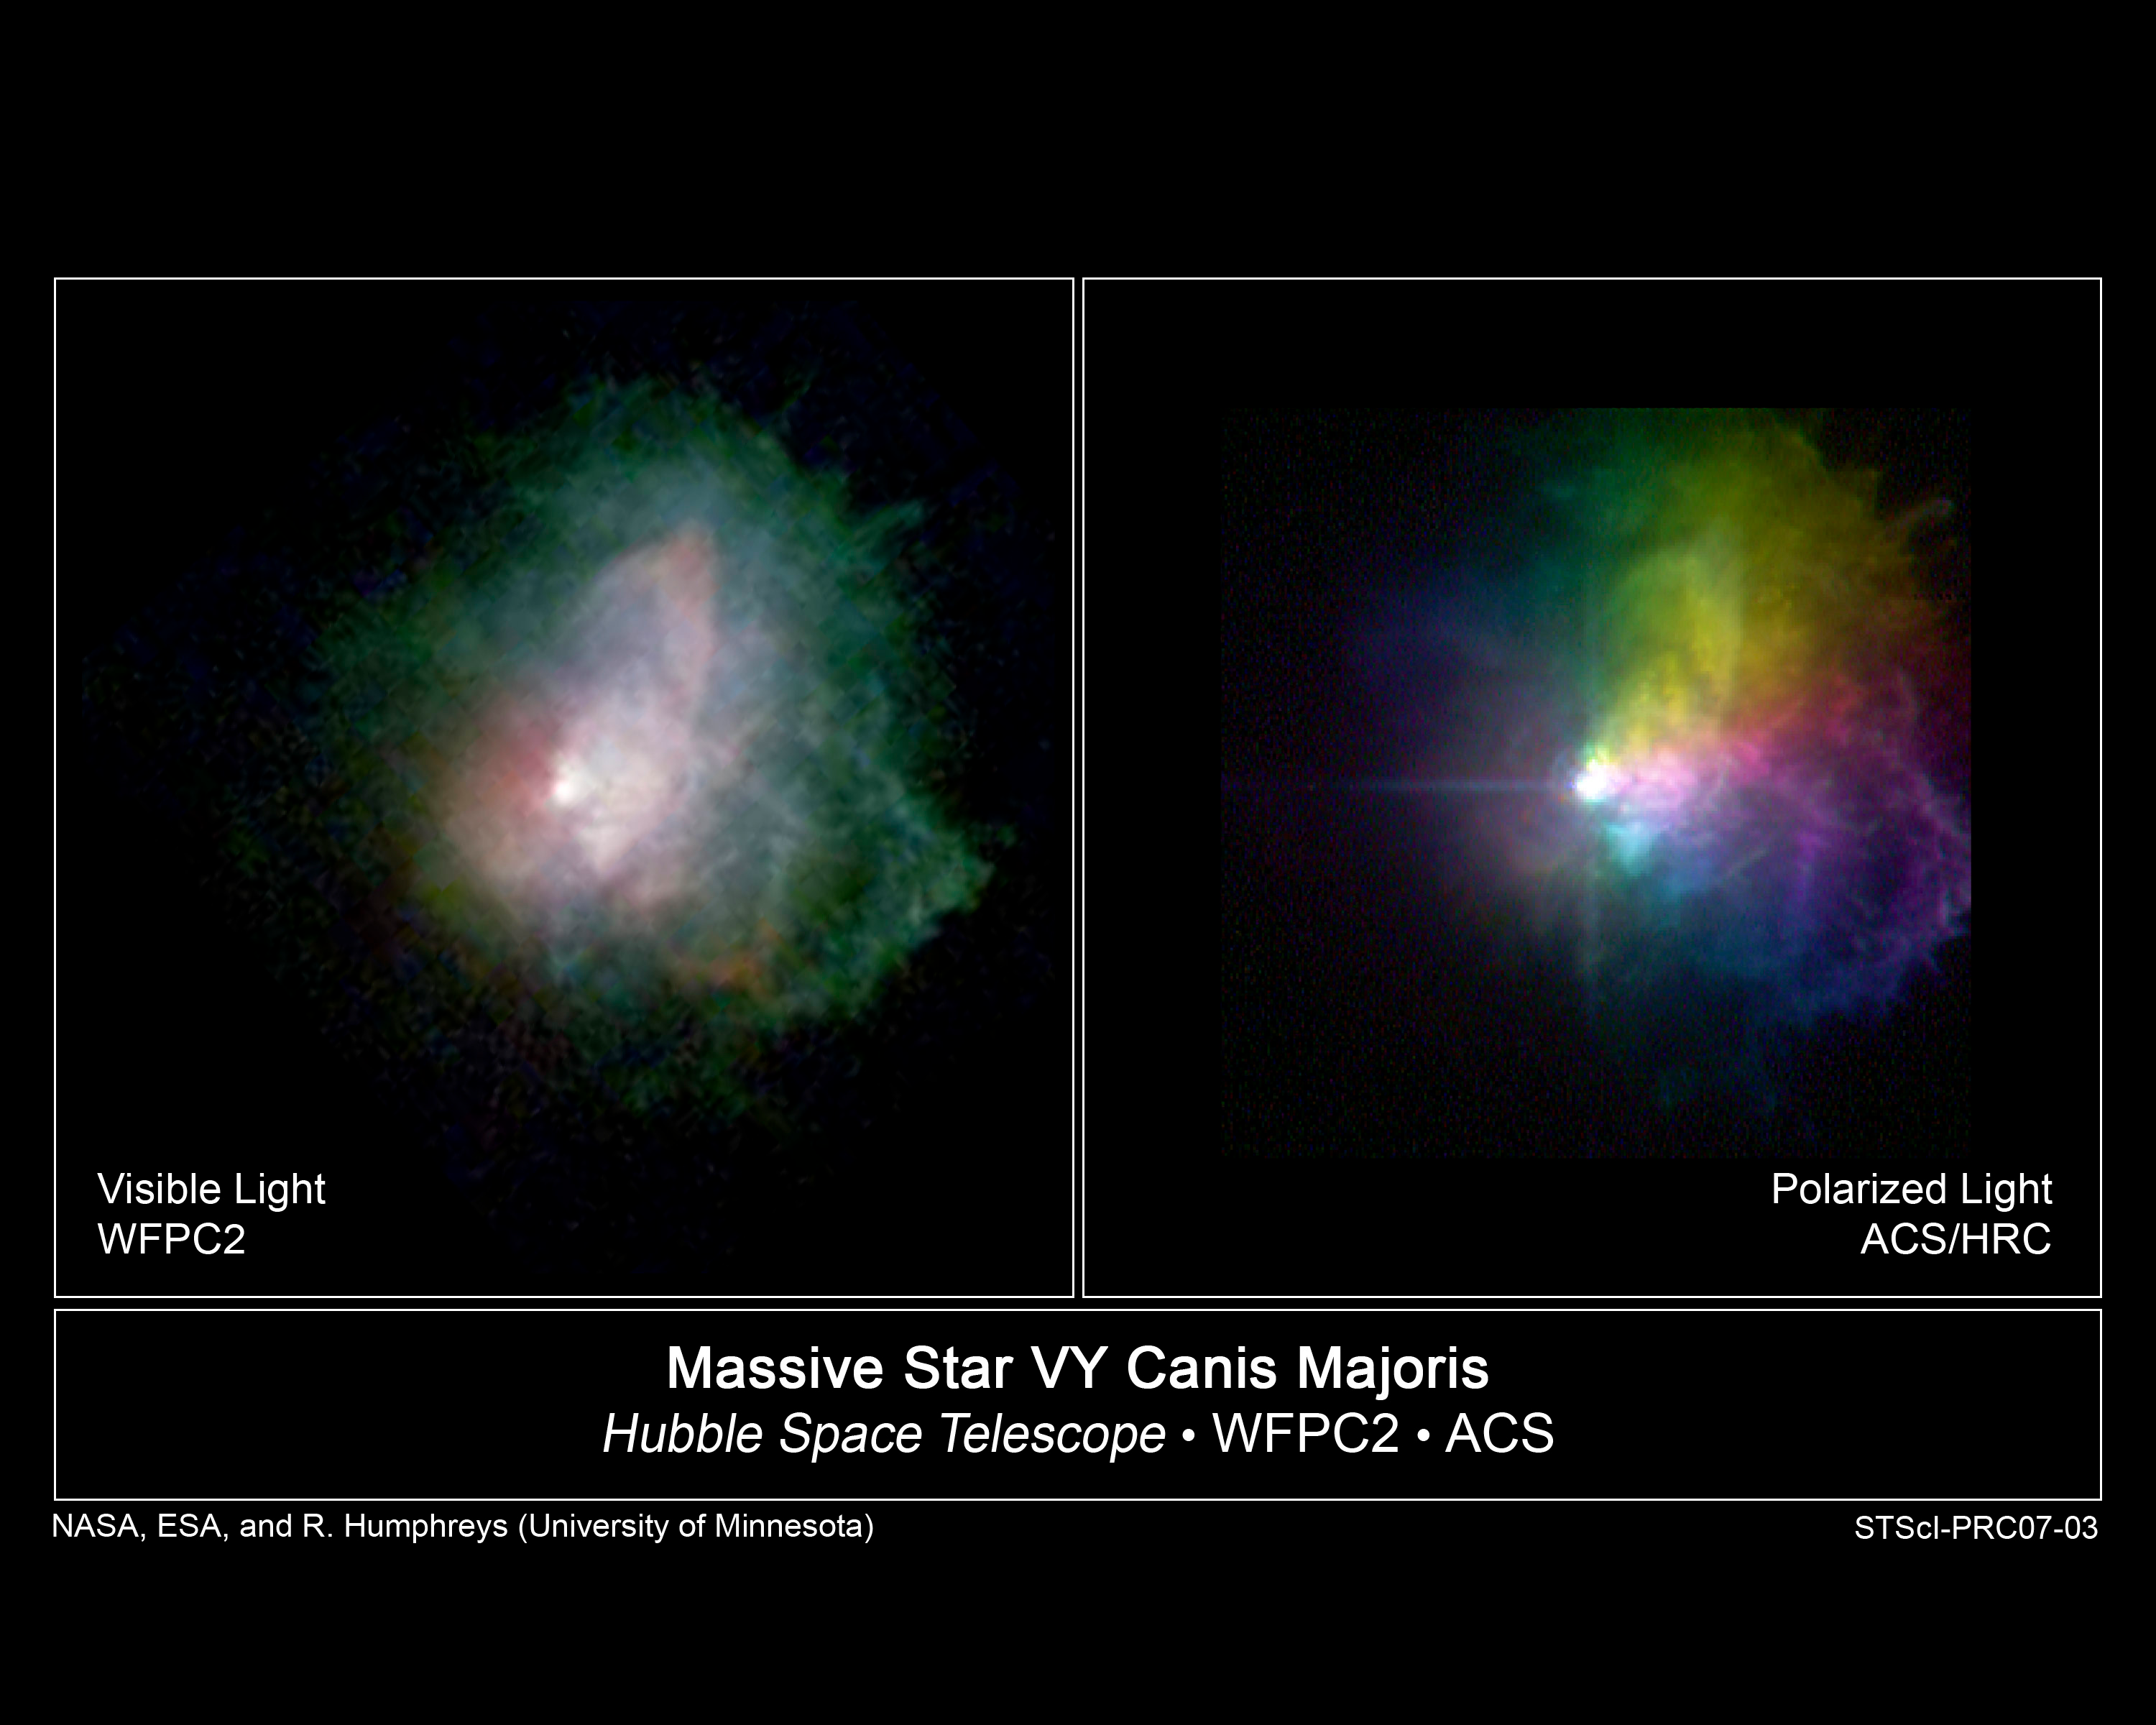

Hubble Images Outbursts from Massive Star

These NASA/ESA Hubble Space Telescope images show the outflow from one of the brightest hypergiant stars in the sky, VY Canis Majoris.

The image on the left, taken with Hubble's Wide Field Planetary Camera 2, reveal its complex circumstellar ejecta, with arcs, filaments, and knots of material formed by the massive outflows. This image provided the first evidence that the brightest arcs and knots were created during several outbursts. The random orientations of the arcs also suggested they were produced by localized eruptions from active regions on the star's surface. This is composite picture from separate images taken in blue, green, red, and near-infrared light.

The image at right, taken with the Advanced Camera for Surveys, was made with polarizing filters to show how the dust ejected by the star is distributed in three-dimensional space. The light from the star becomes polarized when it is reflected off the dust. The dust formed around the star and was driven into space. To see the polarized light, astronomers used a polarizing filter, which lets through only light vibrating in one direction and blocks out light vibrating in other directions. Astronomers assembled this picture from separate images taken at three different polarization angles, colored red, green, and blue.

They measured the velocities of the ejecta from spectra obtained with the Keck 10-meter telescope. They also compared the ejecta's expansion taken with Hubble six years apart. These observations showed that the numerous arcs, loops, and knots were moving at different speeds and in various directions, confirming they were produced from separate events and from different locations on the star. The prominent arc to the northwest or upper right in the Hubble image is moving at 102,700 miles an hour (165,600 kilometers an hour), and was ejected about 500 years ago. The knots near the center of the image are traveling at 80,400 miles an hour (129,600 kilometers an hour).

The star, located 5,000 light-years away, is one of the largest and one of the most luminous evolved stars known. It is 500,000 times brighter and about 30 to 40 times more massive than the Sun.

The Wide Field and Planetary Camera 2 observations were taken March 22, 1999 and June 13, 2005. The Advanced Camera for Surveys images were taken Aug. 17, 2004.

Credit: NASA/ESA and R. Humphreys (University of Minnesota)